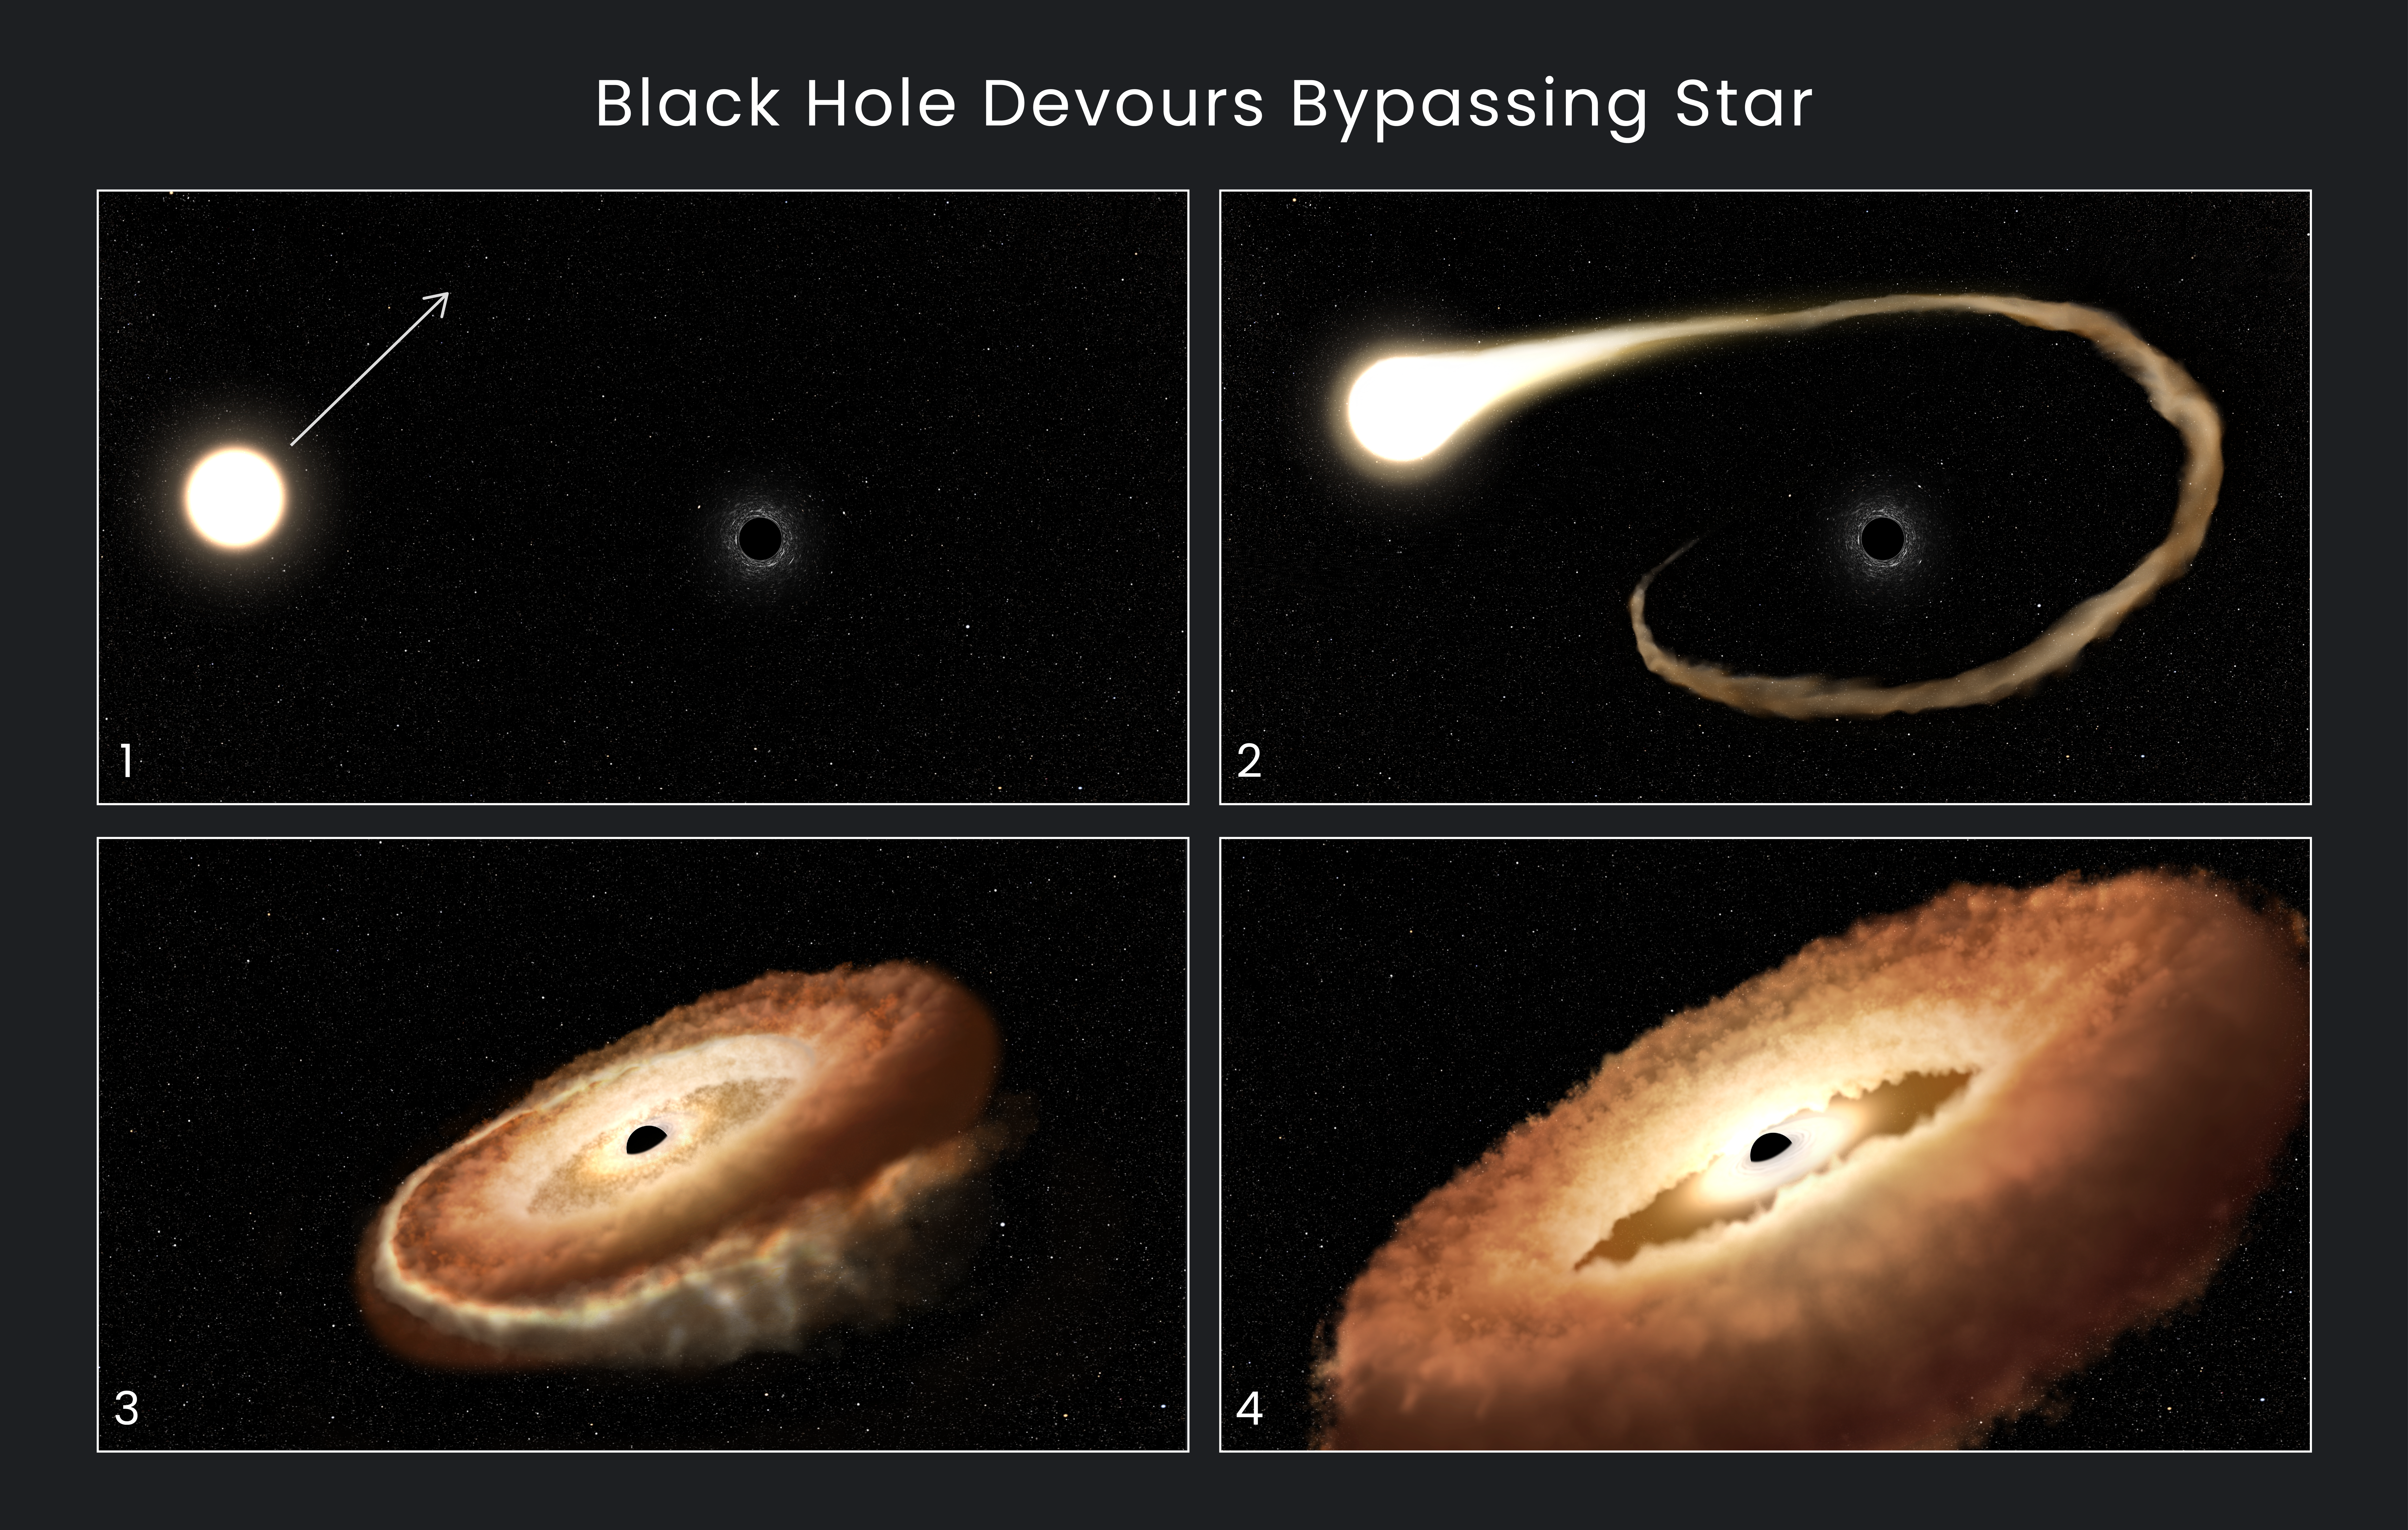

Hubble Finds Hungry Black Hole Twisting Captured Star Into Donut Shape

This sequence of artist illustrations shows how a black hole can devour a bypassing star:

A normal star passes near a supermassive black hole in the center of a galaxy.
The star’s outer gasses are pulled into the black hole’s gravitational field.
The star is shredded as tidal forces pull it apart.
The stellar remnants are pulled into a donut-shaped ring around the black hole, and will eventually fall into the black hole, unleashing a tremendous amount of light and high-energy radiation.

Astronomers using the NASA/ESA Hubble Space Telescope have recorded a star’s final moments in detail as it gets gobbled up by a black hole.

These are termed “tidal disruption events.” But the wording belies the complex, raw violence of a black hole encounter. There is a balance between the black hole’s gravity pulling in star stuff, and radiation blowing material out. In other words, black holes are messy eaters. Astronomers are using Hubble to find out the details of what happens when a wayward star plunges into the gravitational abyss.

Hubble can’t photograph the AT2022dsb tidal event’s mayhem up close, since the munched-up star is nearly 300 million light-years away at the core of the galaxy ESO 583-G004. But astronomers used Hubble’s powerful ultraviolet sensitivity to study the light from the shredded star, which includes hydrogen, carbon, and more. The spectroscopy provides forensic clues to the black hole homicide.

For any given galaxy with a quiescent supermassive black hole at the center, it’s estimated that the stellar shredding happens only a few times in every 100,000 years.

This AT2022dsb stellar snacking event was first caught on 1 March 2022 by the All-Sky Automated Survey for Supernovae (ASAS-SN or “Assassin”), a network of ground-based telescopes that surveys the extragalactic sky roughly once a week for violent, variable, and transient events that are shaping our universe. This energetic collision was close enough to Earth and bright enough for the Hubble astronomers to do ultraviolet spectroscopy over a longer than normal period of time. The Hubble spectroscopic data are interpreted as coming from a very bright, hot, donut-shaped area of gas that was once the star. This area, known as a torus, is the size of the solar system and is swirling around a black hole in the middle.

The results were reported at the 241st meeting of the American Astronomical Society in Seattle, Washington.

Credit: NASA, ESA, Leah Hustak (STScI)